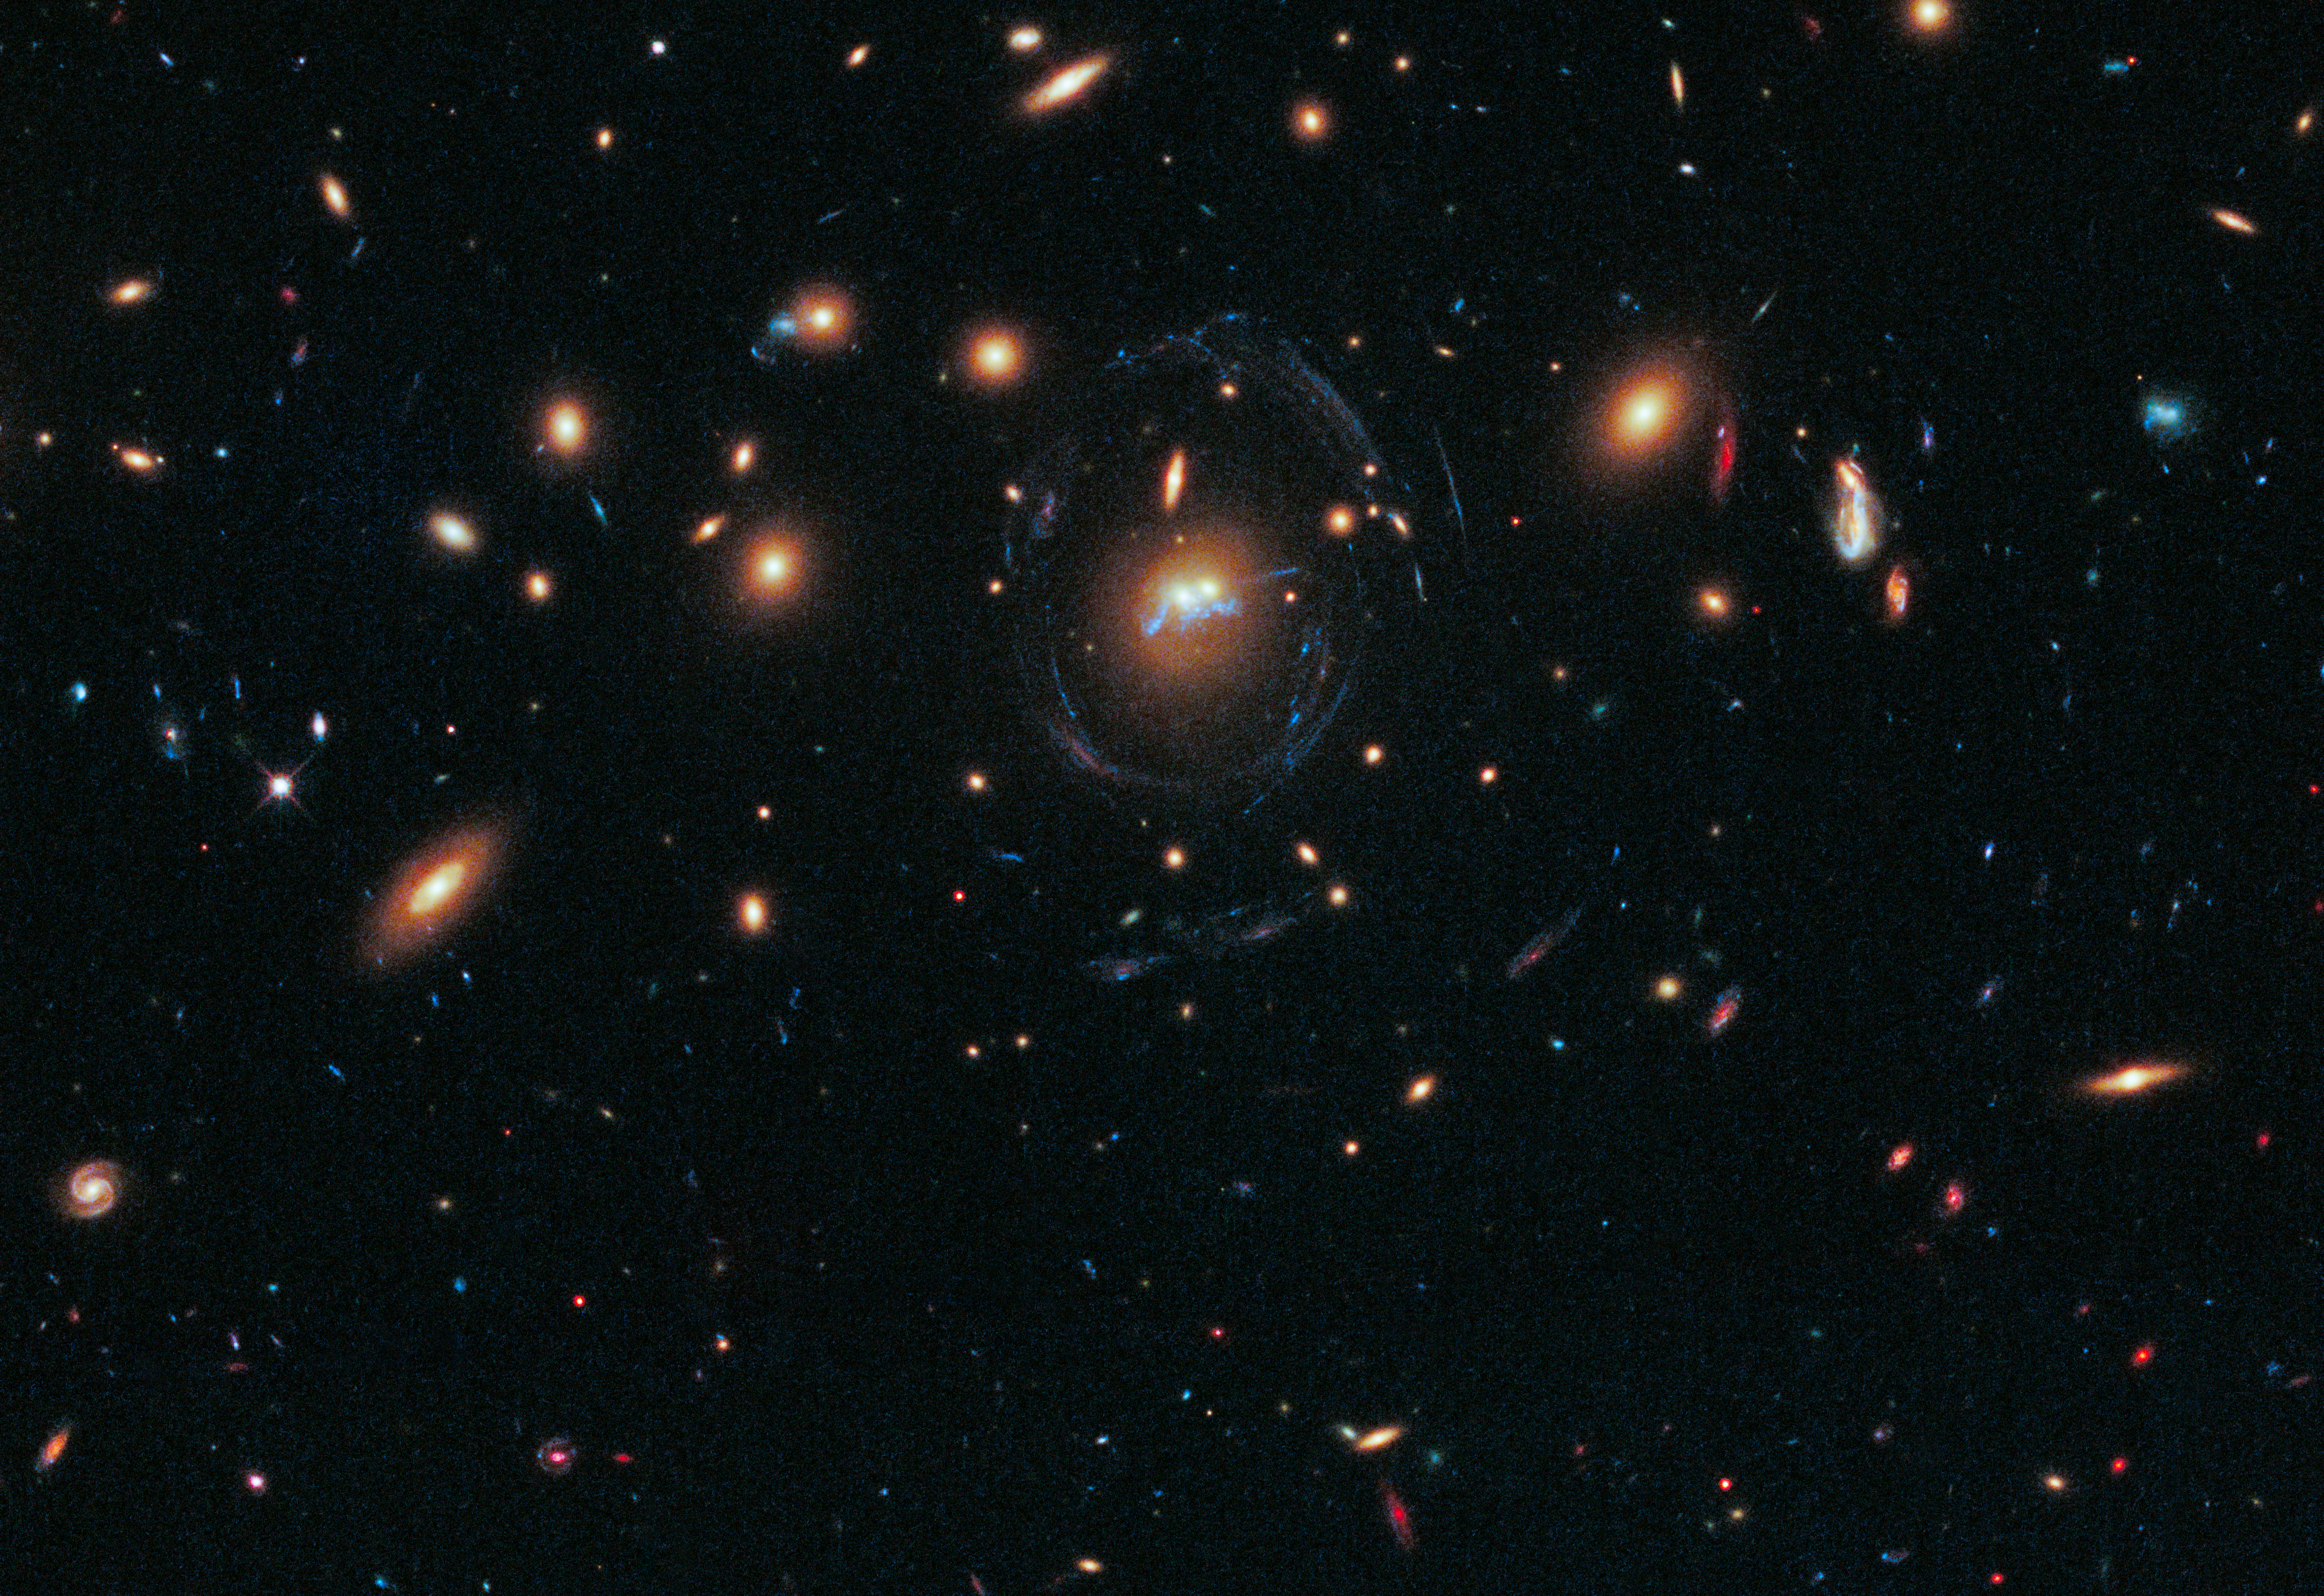

Droplets of star formation and two merging galaxies in SDSS J1531+3414

This new NASA/ESA Hubble Space Telescope image shows two galaxies from the cluster SDSS J1531+3414.

The two galaxies have been found to be merging into one and a "chain" of young stellar superclusters are seen winding around the galaxies’ nuclei. The galaxies are surrounded by an egg-shaped blue ring caused by the immense gravity of the cluster bending light from other galaxies beyond it.

Credit: NASA, ESA/Hubble and Grant Tremblay (European Southern Observatory)
Acknowledgement: M. Gladders & M. Florian (University of Chicago, USA), S. Baum, C. O'Dea & K. Cooke (Rochester Institute of Technology, USA), M. Bayliss (Harvard-Smithsonian Center for Astrophysics, USA), H. Dahle (University of Oslo, Norway), T. Davis (European Southern Observatory), J. Rigby (NASA Goddard Space Flight Center, USA), K. Sharon (University of Michigan, USA), E. Soto (The Catholic University of America, USA) and E. Wuyts (Max-Planck-Institute for Extraterrestrial Physics, Germany).